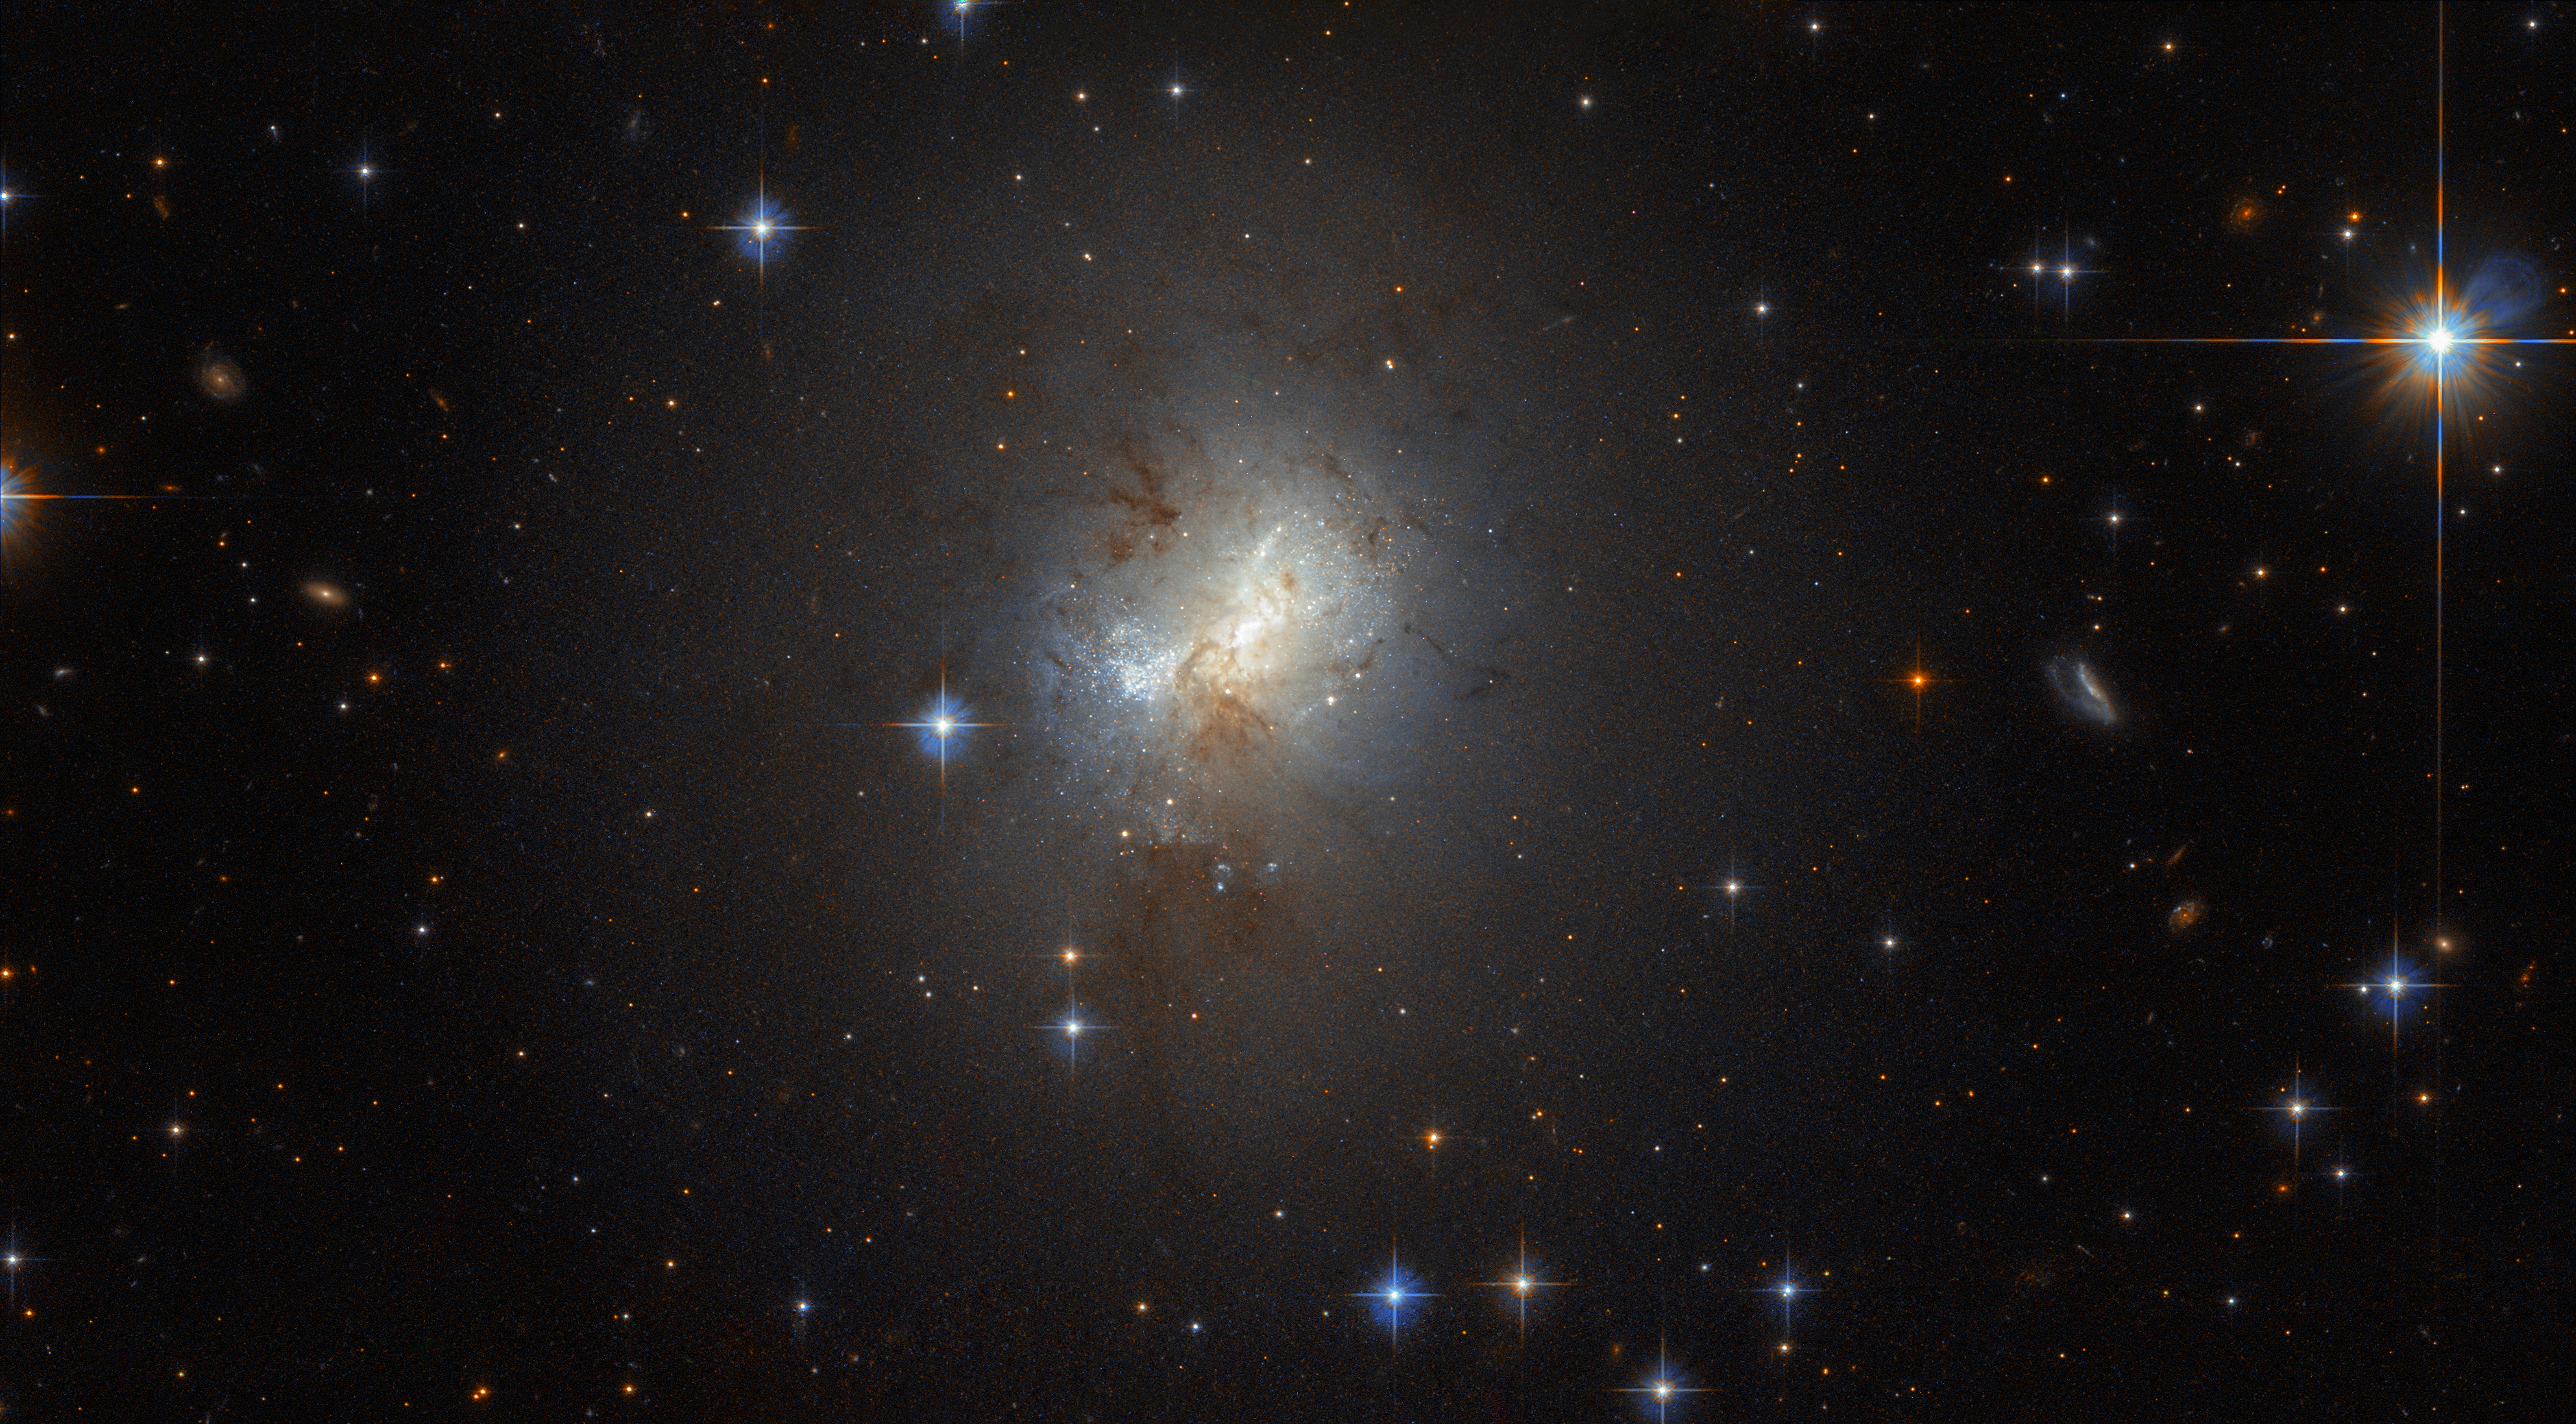

A tiny galaxy with a big heart

Nestled within this field of bright foreground stars lies ESO 495-21, a tiny galaxy with a big heart. ESO 495-21 is just 3000 light-years across, a fraction of the size of the Milky Way, but that is not stopping the galaxy from furiously forming huge numbers of stars.

There are also indicators for a supermassive black hole in its centre - an unusual component for a galaxy of its size.

Credit: ESA/Hubble, NASA